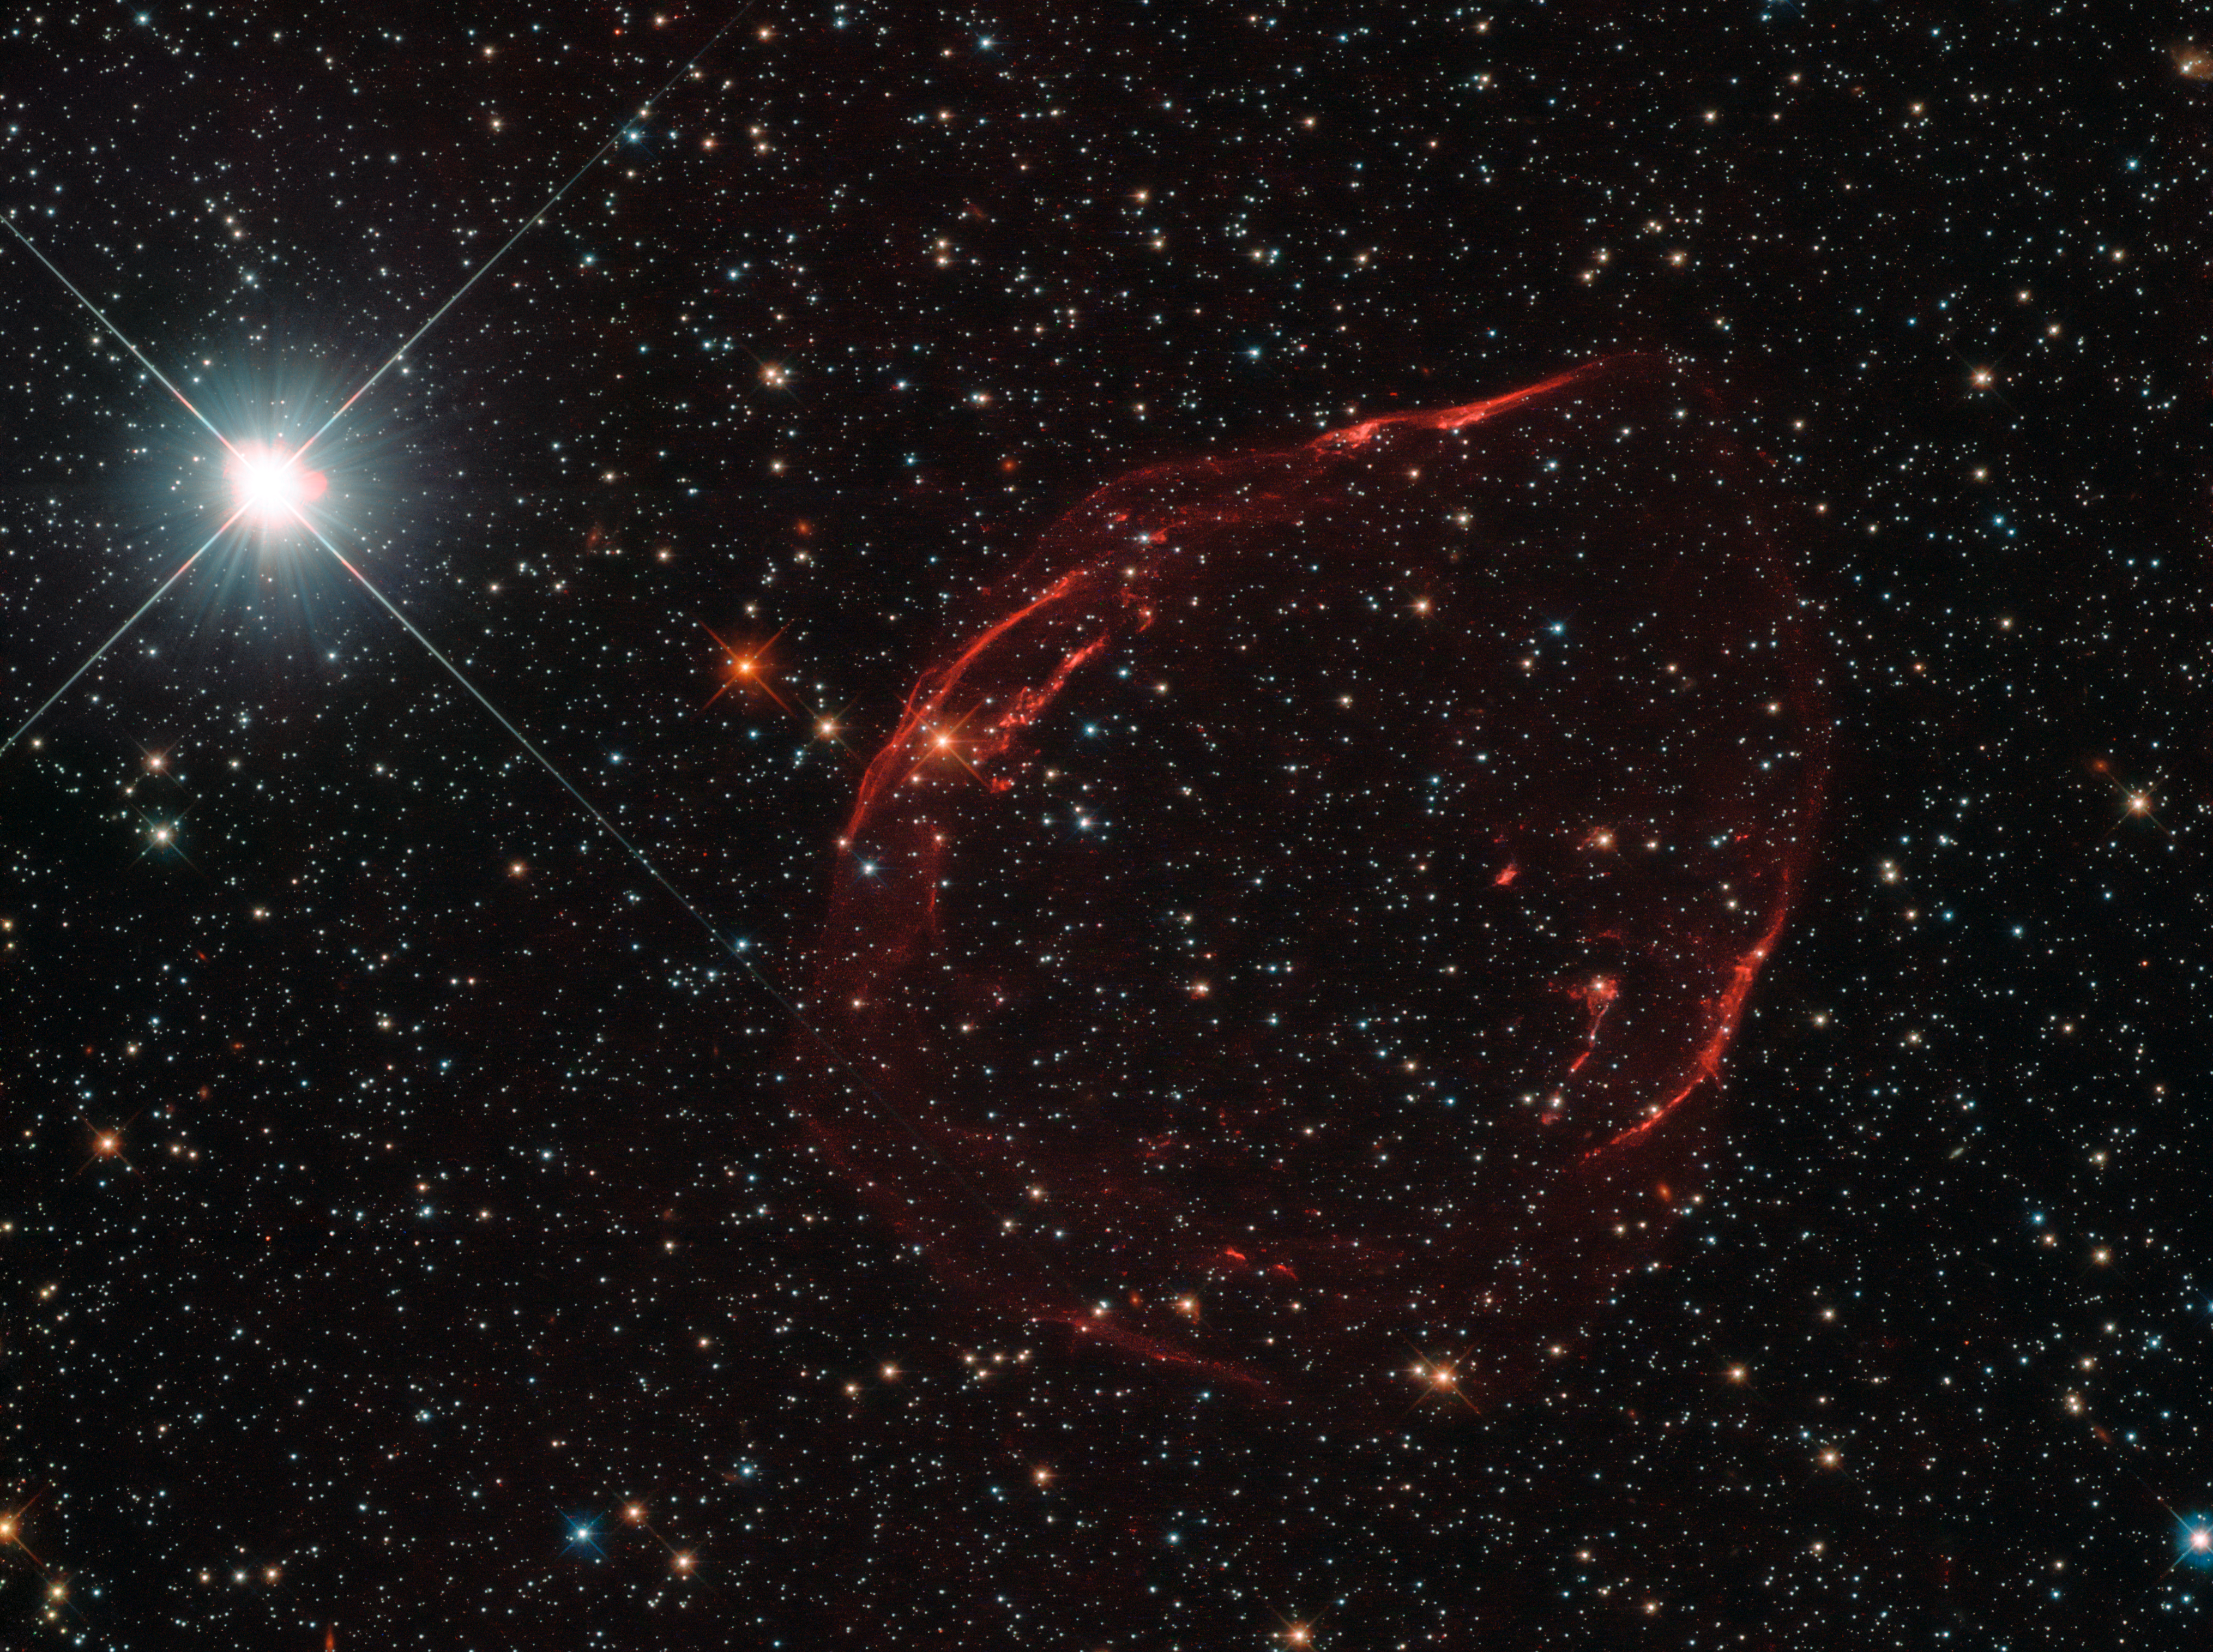

Stellar shrapnel

Several thousand years ago, a star some 160 000 light-years away from us exploded, scattering stellar shrapnel across the sky. The aftermath of this energetic detonation is shown here in this striking image from the NASA/ESA Hubble Space Telescope’s Wide Field Camera 3.

The exploding star was a white dwarf located in the Large Magellanic Cloud, one of our nearest neighbouring galaxies. Around 97% of stars within the Milky Way that are between a tenth and eight times the mass of the Sun are expected to end up as white dwarfs. These stars can face a number of different fates, one of which is to explode as supernovae, some of the brightest events ever observed in the Universe. If a white dwarf is part of a binary star system, it can siphon material from a close companion. After gobbling up more than it can handle — and swelling to approximately one and a half times the size of the Sun — the star becomes unstable and ignites as a Type Ia supernova.

This was the case for the supernova remnant pictured here, which is known as DEM L71. It formed when a white dwarf reached the end of its life and ripped itself apart, ejecting a superheated cloud of debris in the process. Slamming into the surrounding interstellar gas, this stellar shrapnel gradually diffused into the separate fiery filaments of material seen scattered across this skyscape.

Credit: ESA/Hubble & NASA, Y. Chu